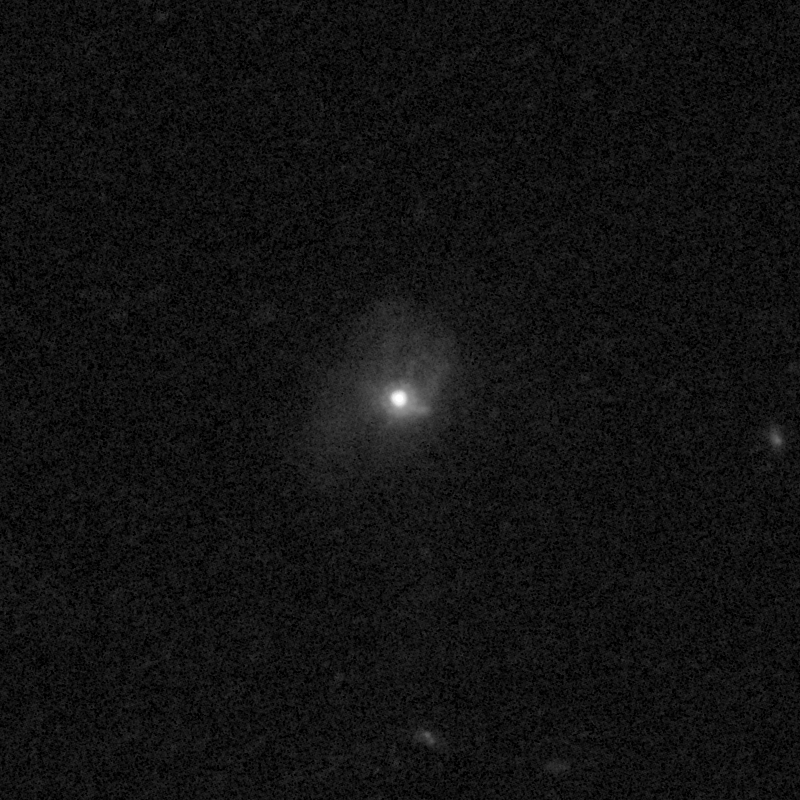

Outflows from merging galaxy J1506+5402

This NASA/ESA Hubble Space Telescope image of the galaxy J1506+5402 shows it is undergoing a firestorm of star birth, as shown by its bright white cores.

This star-making frenzy was ignited by mergers with other galaxies. The odd shape of the galaxy is telltale evidence of a close encounters.

The new Hubble Wide Field Camera 3 observations of this and eleven other galaxies undergoing the same process suggest that energy from the star-birthing frenzies created powerful winds that are blowing out the gas, meaning it is not available to form future generations of stars.

This activity occurred when the Universe was half its current age of 13.7 billion years. The gas-poor galaxies may eventually become so-called red and dead galaxies, composed only of aging stars.

This Hubble false-colour image was processed to bring out important details in the galaxy. The image were taken in 2010.

Credit: NASA, ESA, and P. Sell (Texas Tech University)